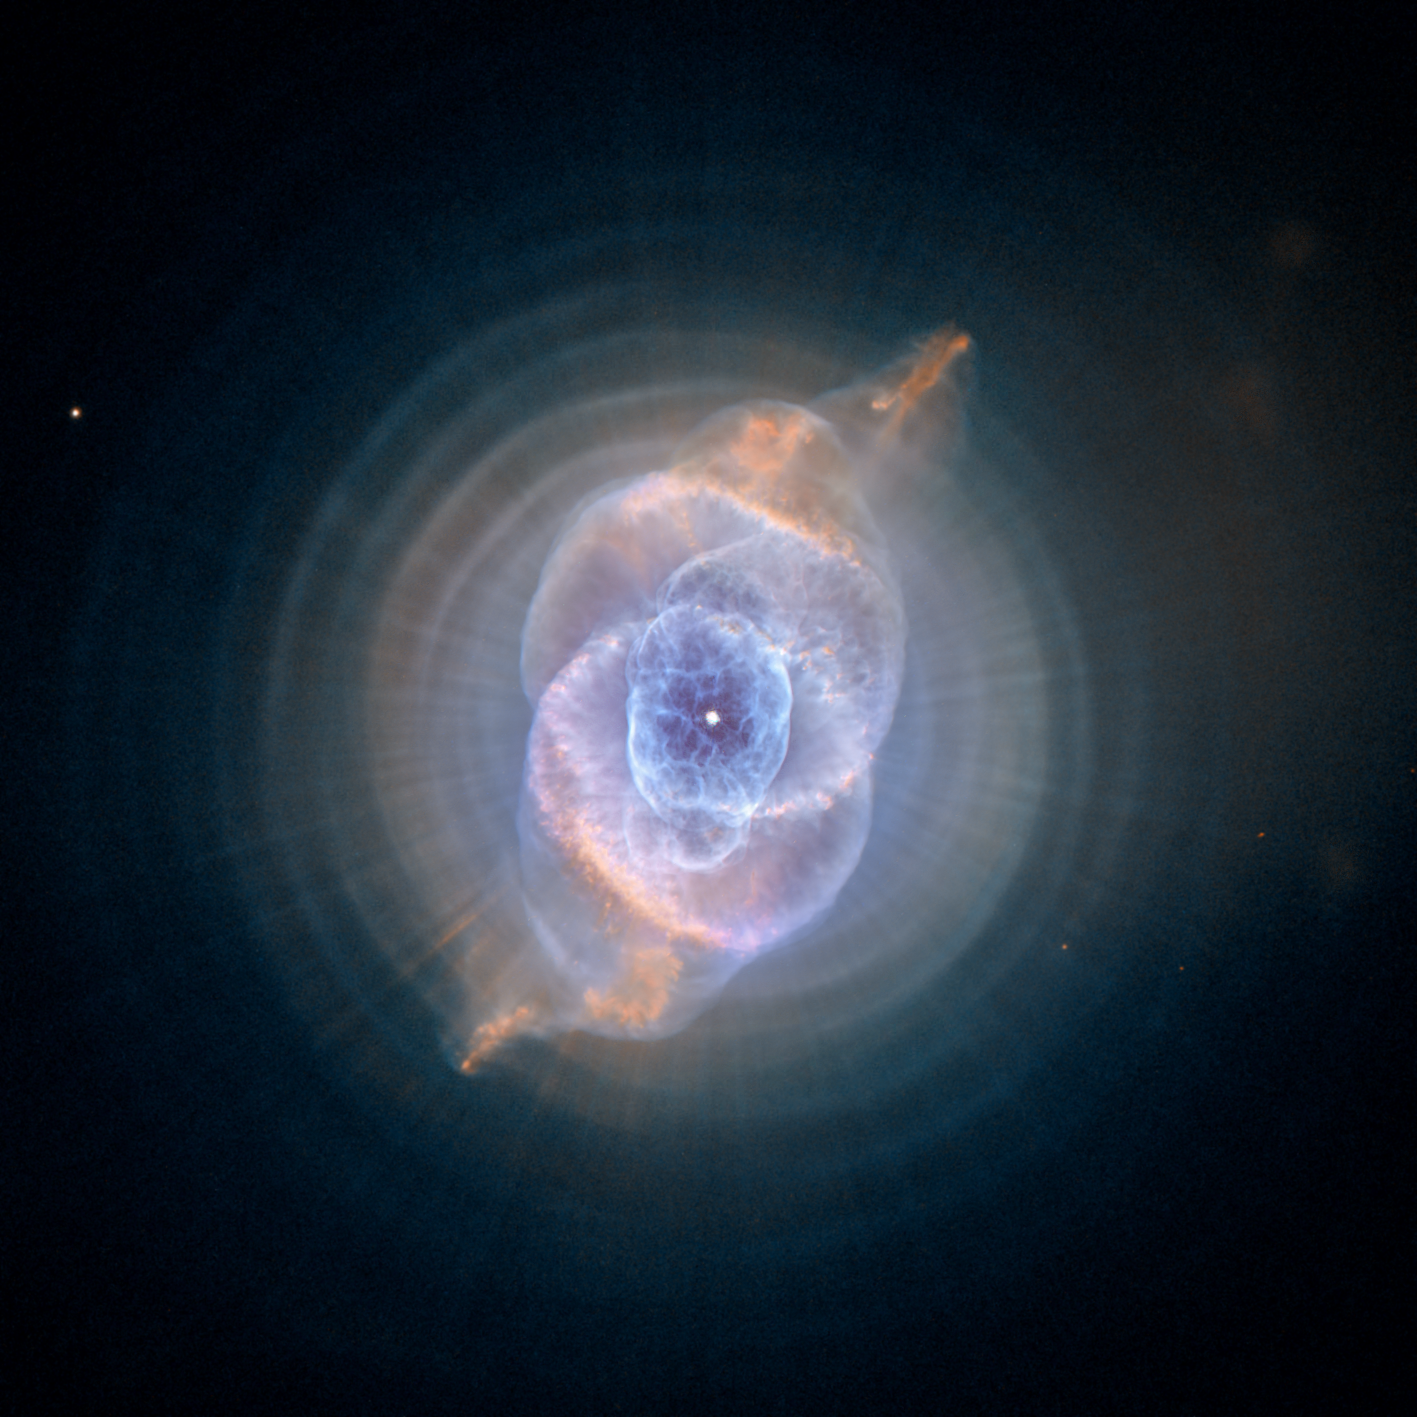

Dying star creates fantasy-like sculpture of gas and dust

In this detailed view from the NASA/ESA Hubble Space Telescope, the so-called Cat's Eye Nebula looks like the penetrating eye of the disembodied sorcerer Sauron from the film adaptation of "Lord of the Rings."

The nebula, formally catalogued NGC 6543, is every bit as inscrutable as the J.R.R. Tolkien phantom character. Although the Cat's Eye Nebula was among the first planetary nebula ever to be discovered, it is one of the most complex planetary nebulae ever seen in space. A planetary nebula forms when Sun-like stars gently eject their outer gaseous layers to form bright nebulae with amazing twisted shapes.

Credit: ESA, NASA, HEIC and The Hubble Heritage Team (STScI/AURA)